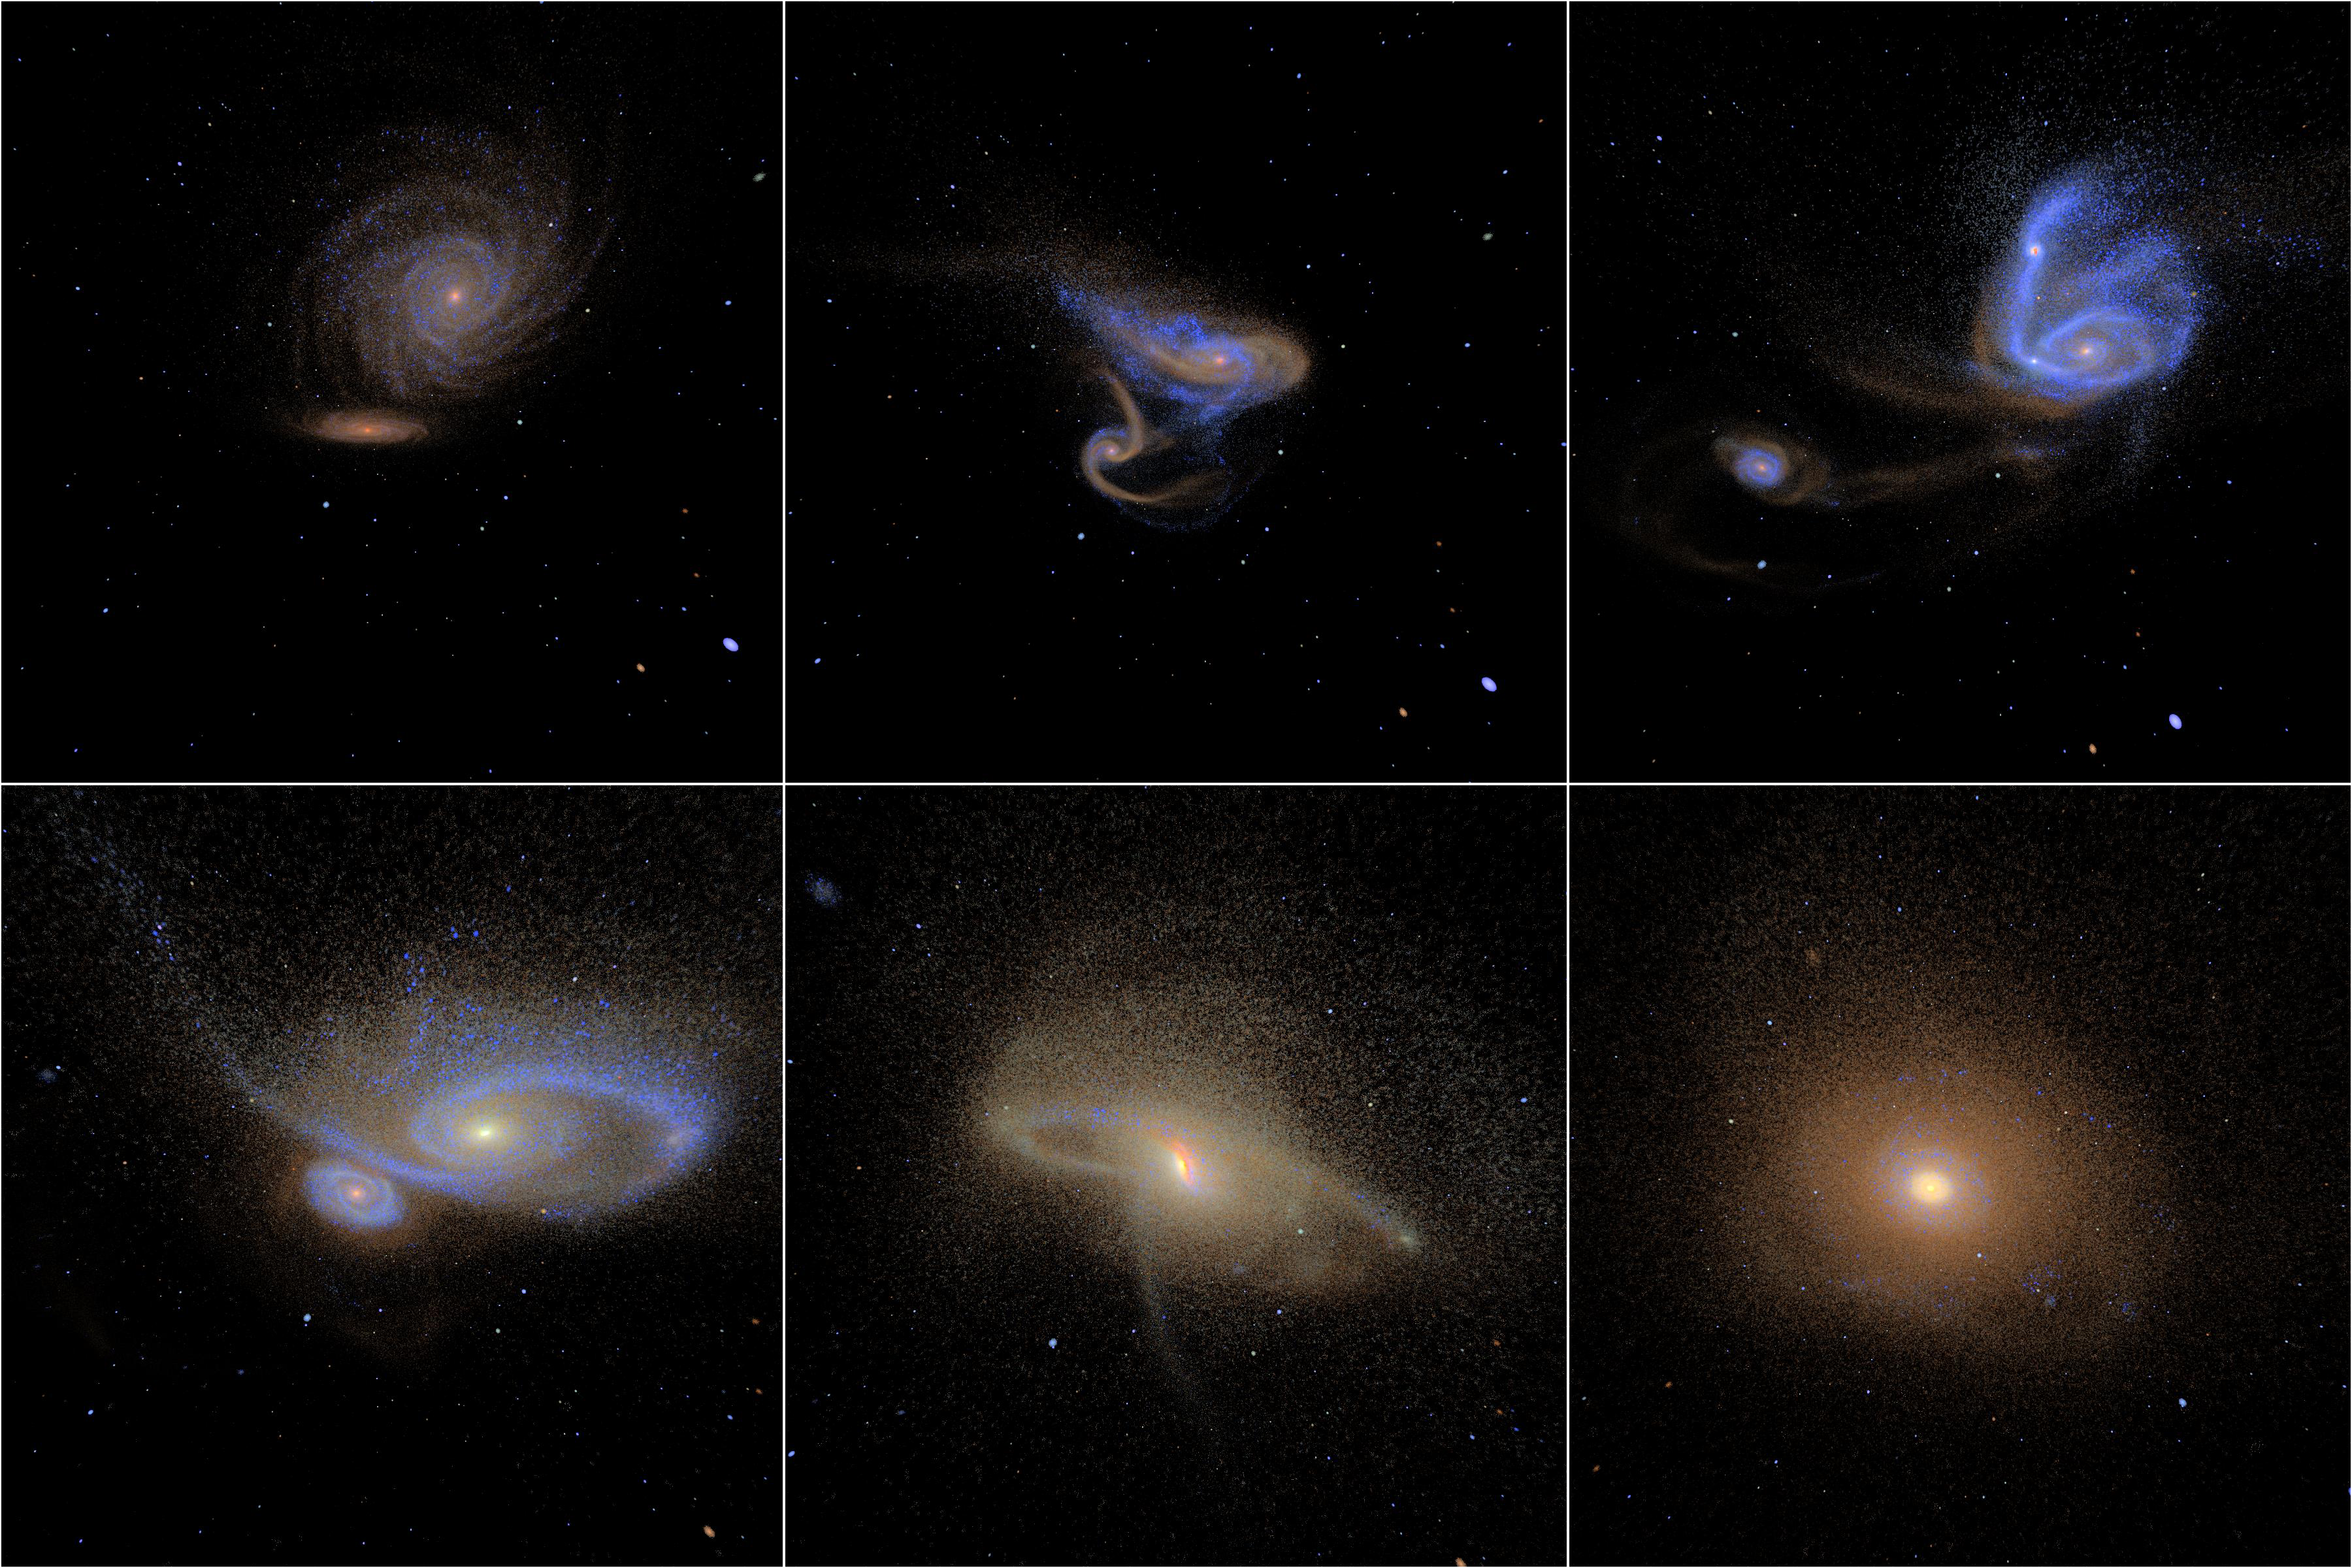

Simulated images of merging galaxies

These illustrations demonstrate how two galaxies coalesce in a slow dance that lasts about a billion years.

The graphics are taken from a simulation astronomers created to determine how long it takes for galaxies to complete a merger. By understanding the time it takes for two merging systems to become one normal-looking galaxy, astronomers can calculate how many galaxy encounters happen over time. This information yields important clues about how galaxies have changed throughout the Universe's history.

Credit: P. Jonsson (Harvard-Smithsonian Center for Astrophysics, USA), G. Novak (Princeton University, USA), and T.J. Cox (Carnegie Observatories, Pasadena, Calif., USA)